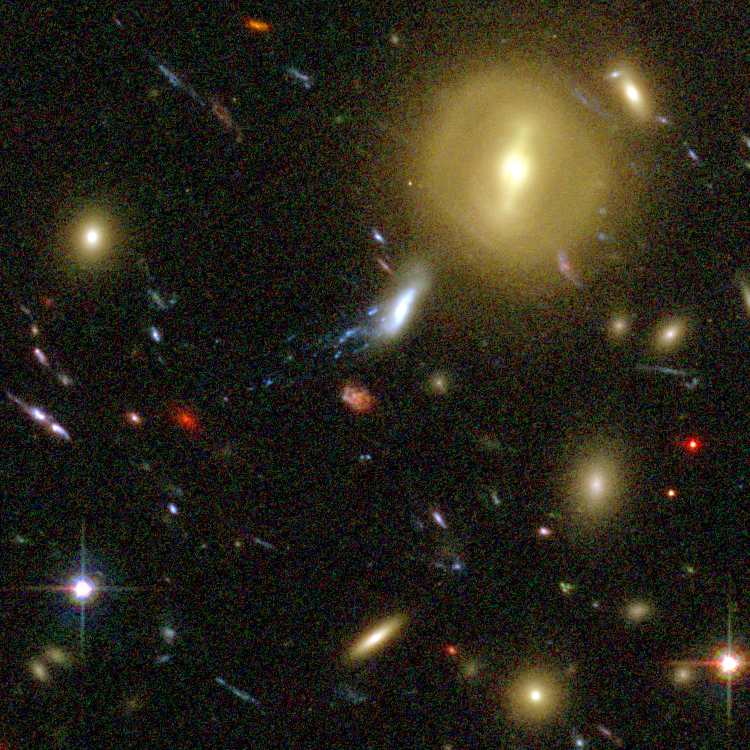

Galaxy Cluster Abell 1689 Details

The Advanced Camera for Surveys (ACS) aboard NASA's Hubble Space Telescope has here used a natural "zoom lens" in space to peer straight through the center of one of the most massive galaxy clusters known, called Abell 1689. Some of the faintest objects in this picture are probably more than 13 billion light-years away.

Credit: NASA, N. Benitez (JHU), T. Broadhurst (The Hebrew University), H. Ford (JHU), M. Clampin(STScI), G. Hartig (STScI), G. Illingworth (UCO/Lick Observatory), the ACS Science Team and ESA